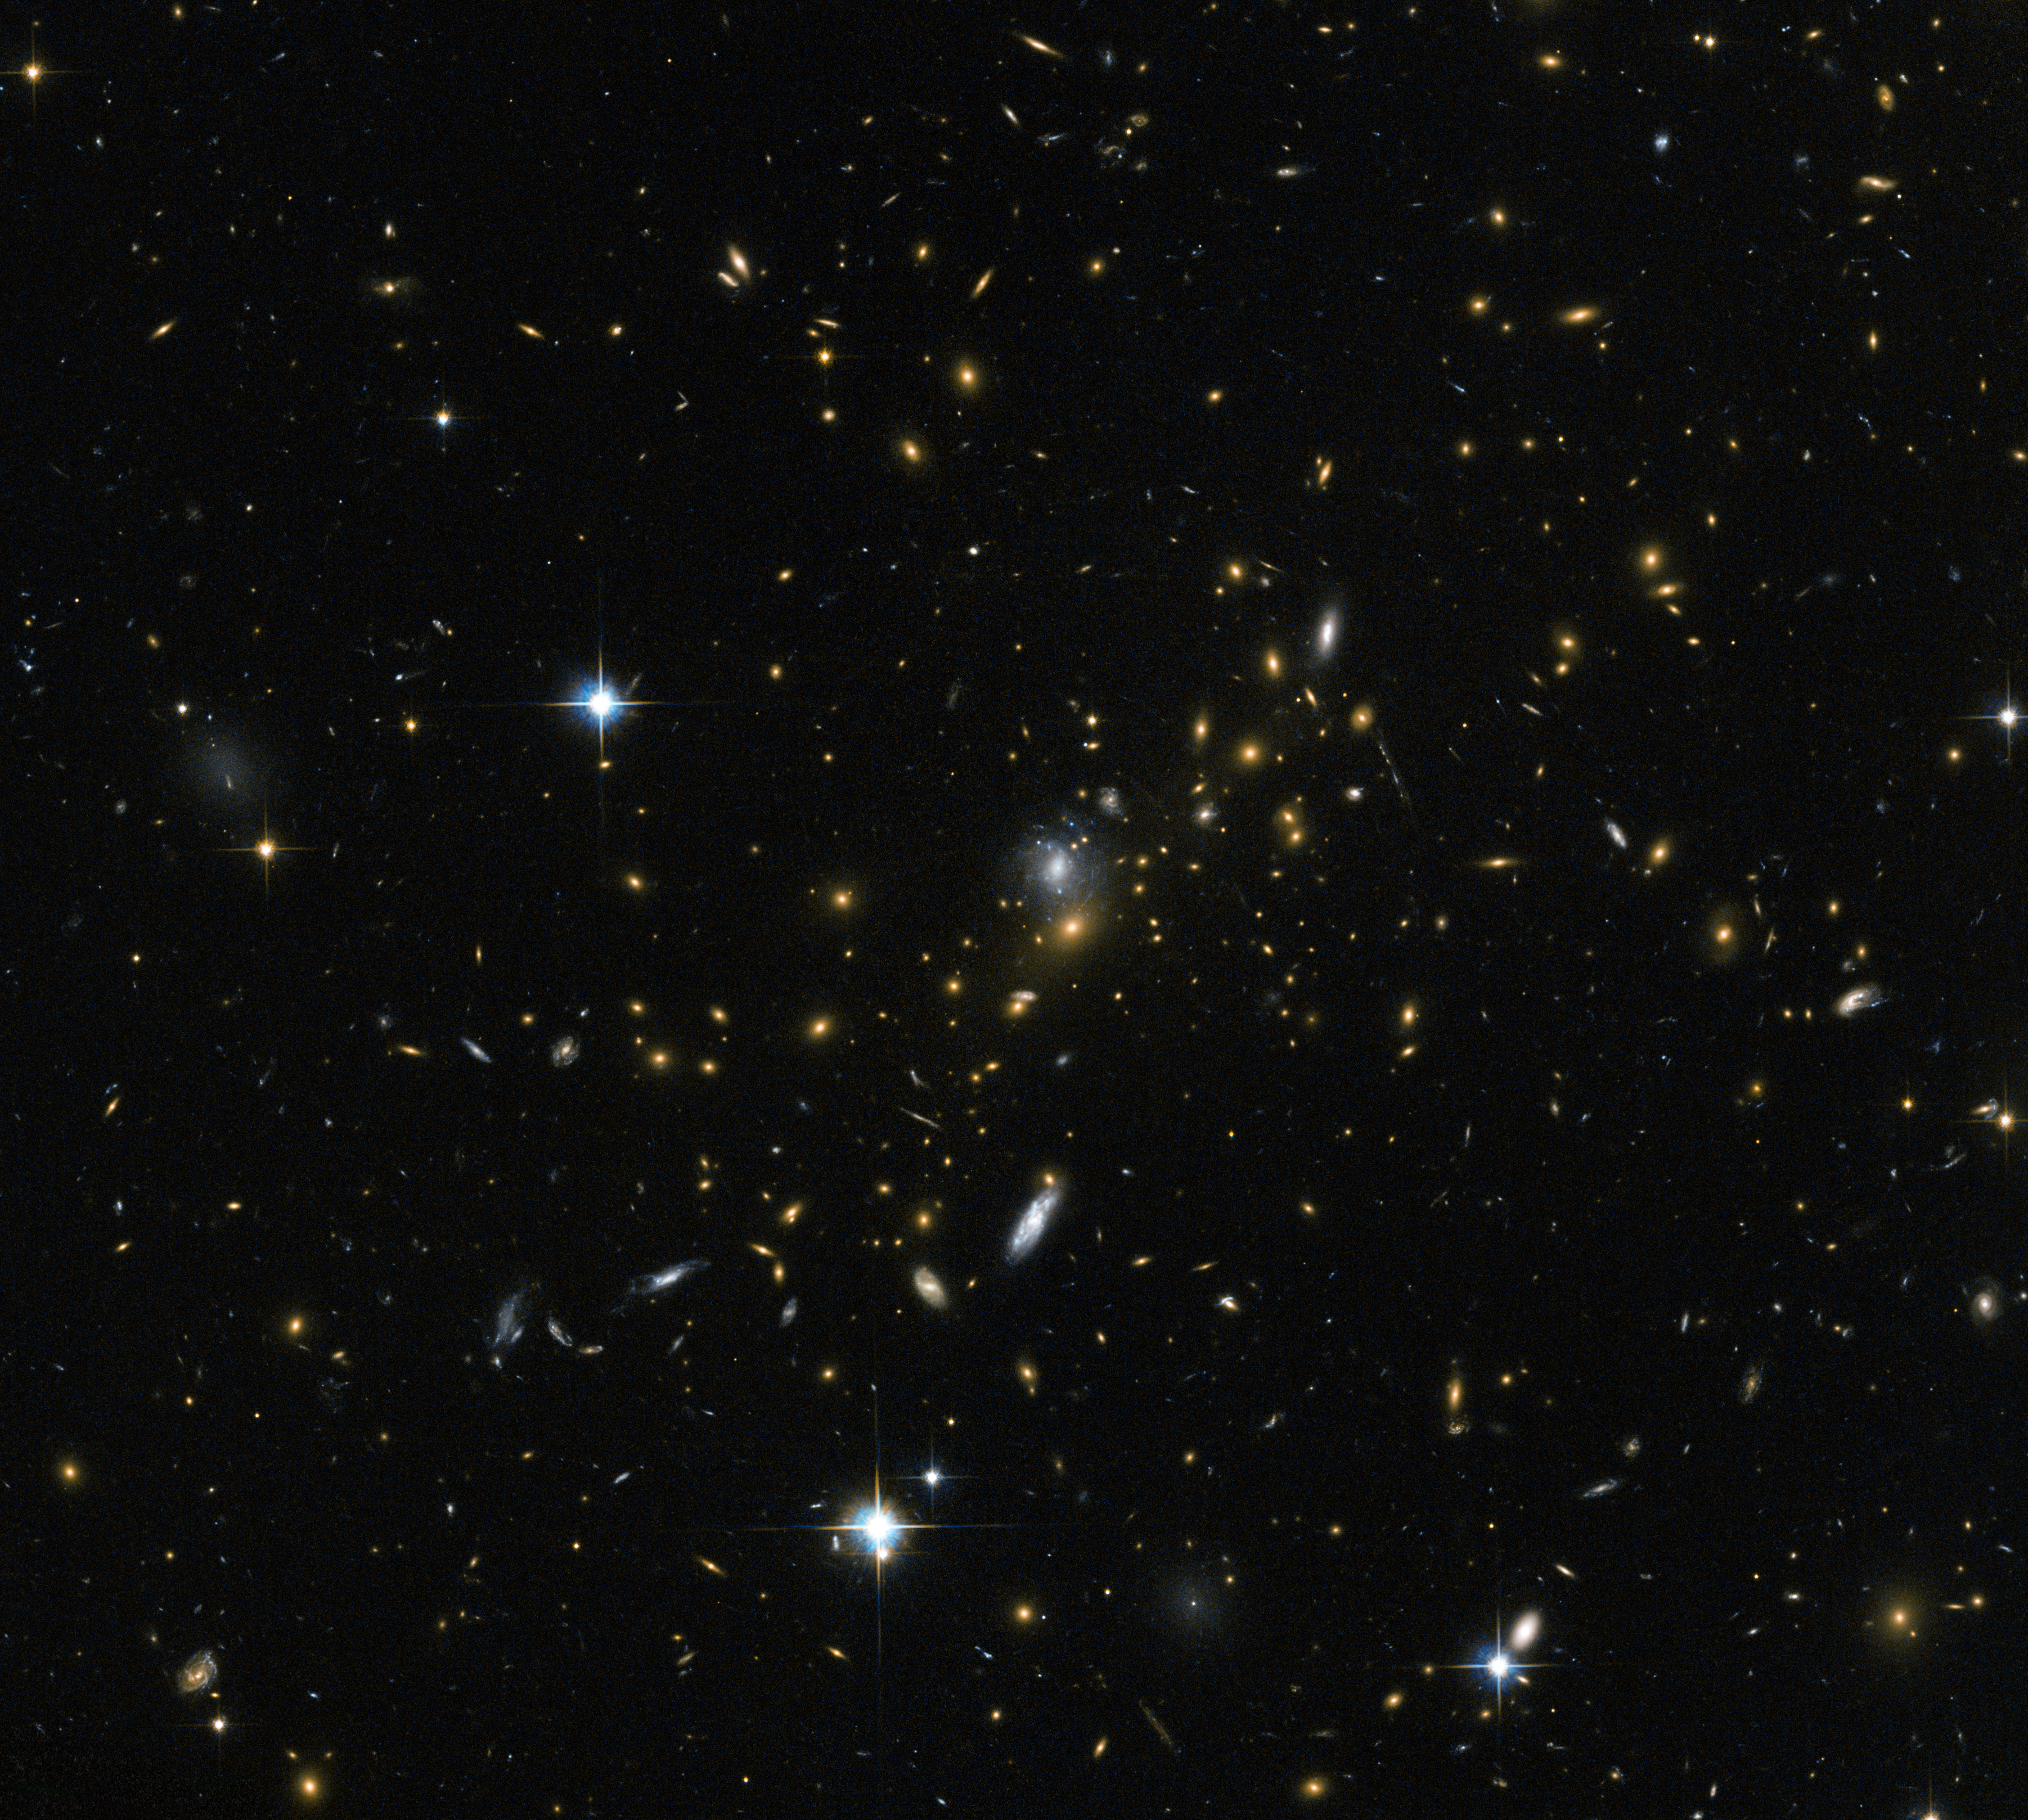

Magnifying the distant Universe

Galaxy clusters are some of the most massive structures that can be found in the Universe — large groups of galaxies bound together by gravity. This image from the NASA/ESA Hubble Space Telescope reveals one of these clusters, known as MACS J0454.1-0300. Each of the bright spots seen here is a galaxy, and each is home to many millions, or even billions, of stars.

Astronomers have determined the mass of MACS J0454.1-0300 to be around 180 trillion times the mass of the Sun. Clusters like this are so massive that their gravity can even change the behaviour of space around them, bending the path of light as it travels through them, sometimes amplifying it and acting like a cosmic magnifying glass. Thanks to this effect, it is possible to see objects that are so far away from us that they would otherwise be too faint to be detected.

In this case, several objects appear to be dramatically elongated and are seen as sweeping arcs to the left of this image. These are galaxies located at vast distances behind the cluster — their image has been amplified, but also distorted, as their light passes through MACS J0454.1-0300. This process, known as gravitational lensing, is an extremely valuable tool for astronomers as they peer at very distant objects.

This effect will be put to good use with the start of Hubble's Frontier Fields program over the next few years, which aims to explore very distant objects located behind lensing clusters, similar to MACS J0454.1-0300, to investigate how stars and galaxies formed and evolved in the early Universe.

A version of this image was entered into the Hubble's Hidden Treasures image processing competition by contestant Nick Rose.

Credit: ESA/Hubble & NASA Acknowledgement: Nick Rose